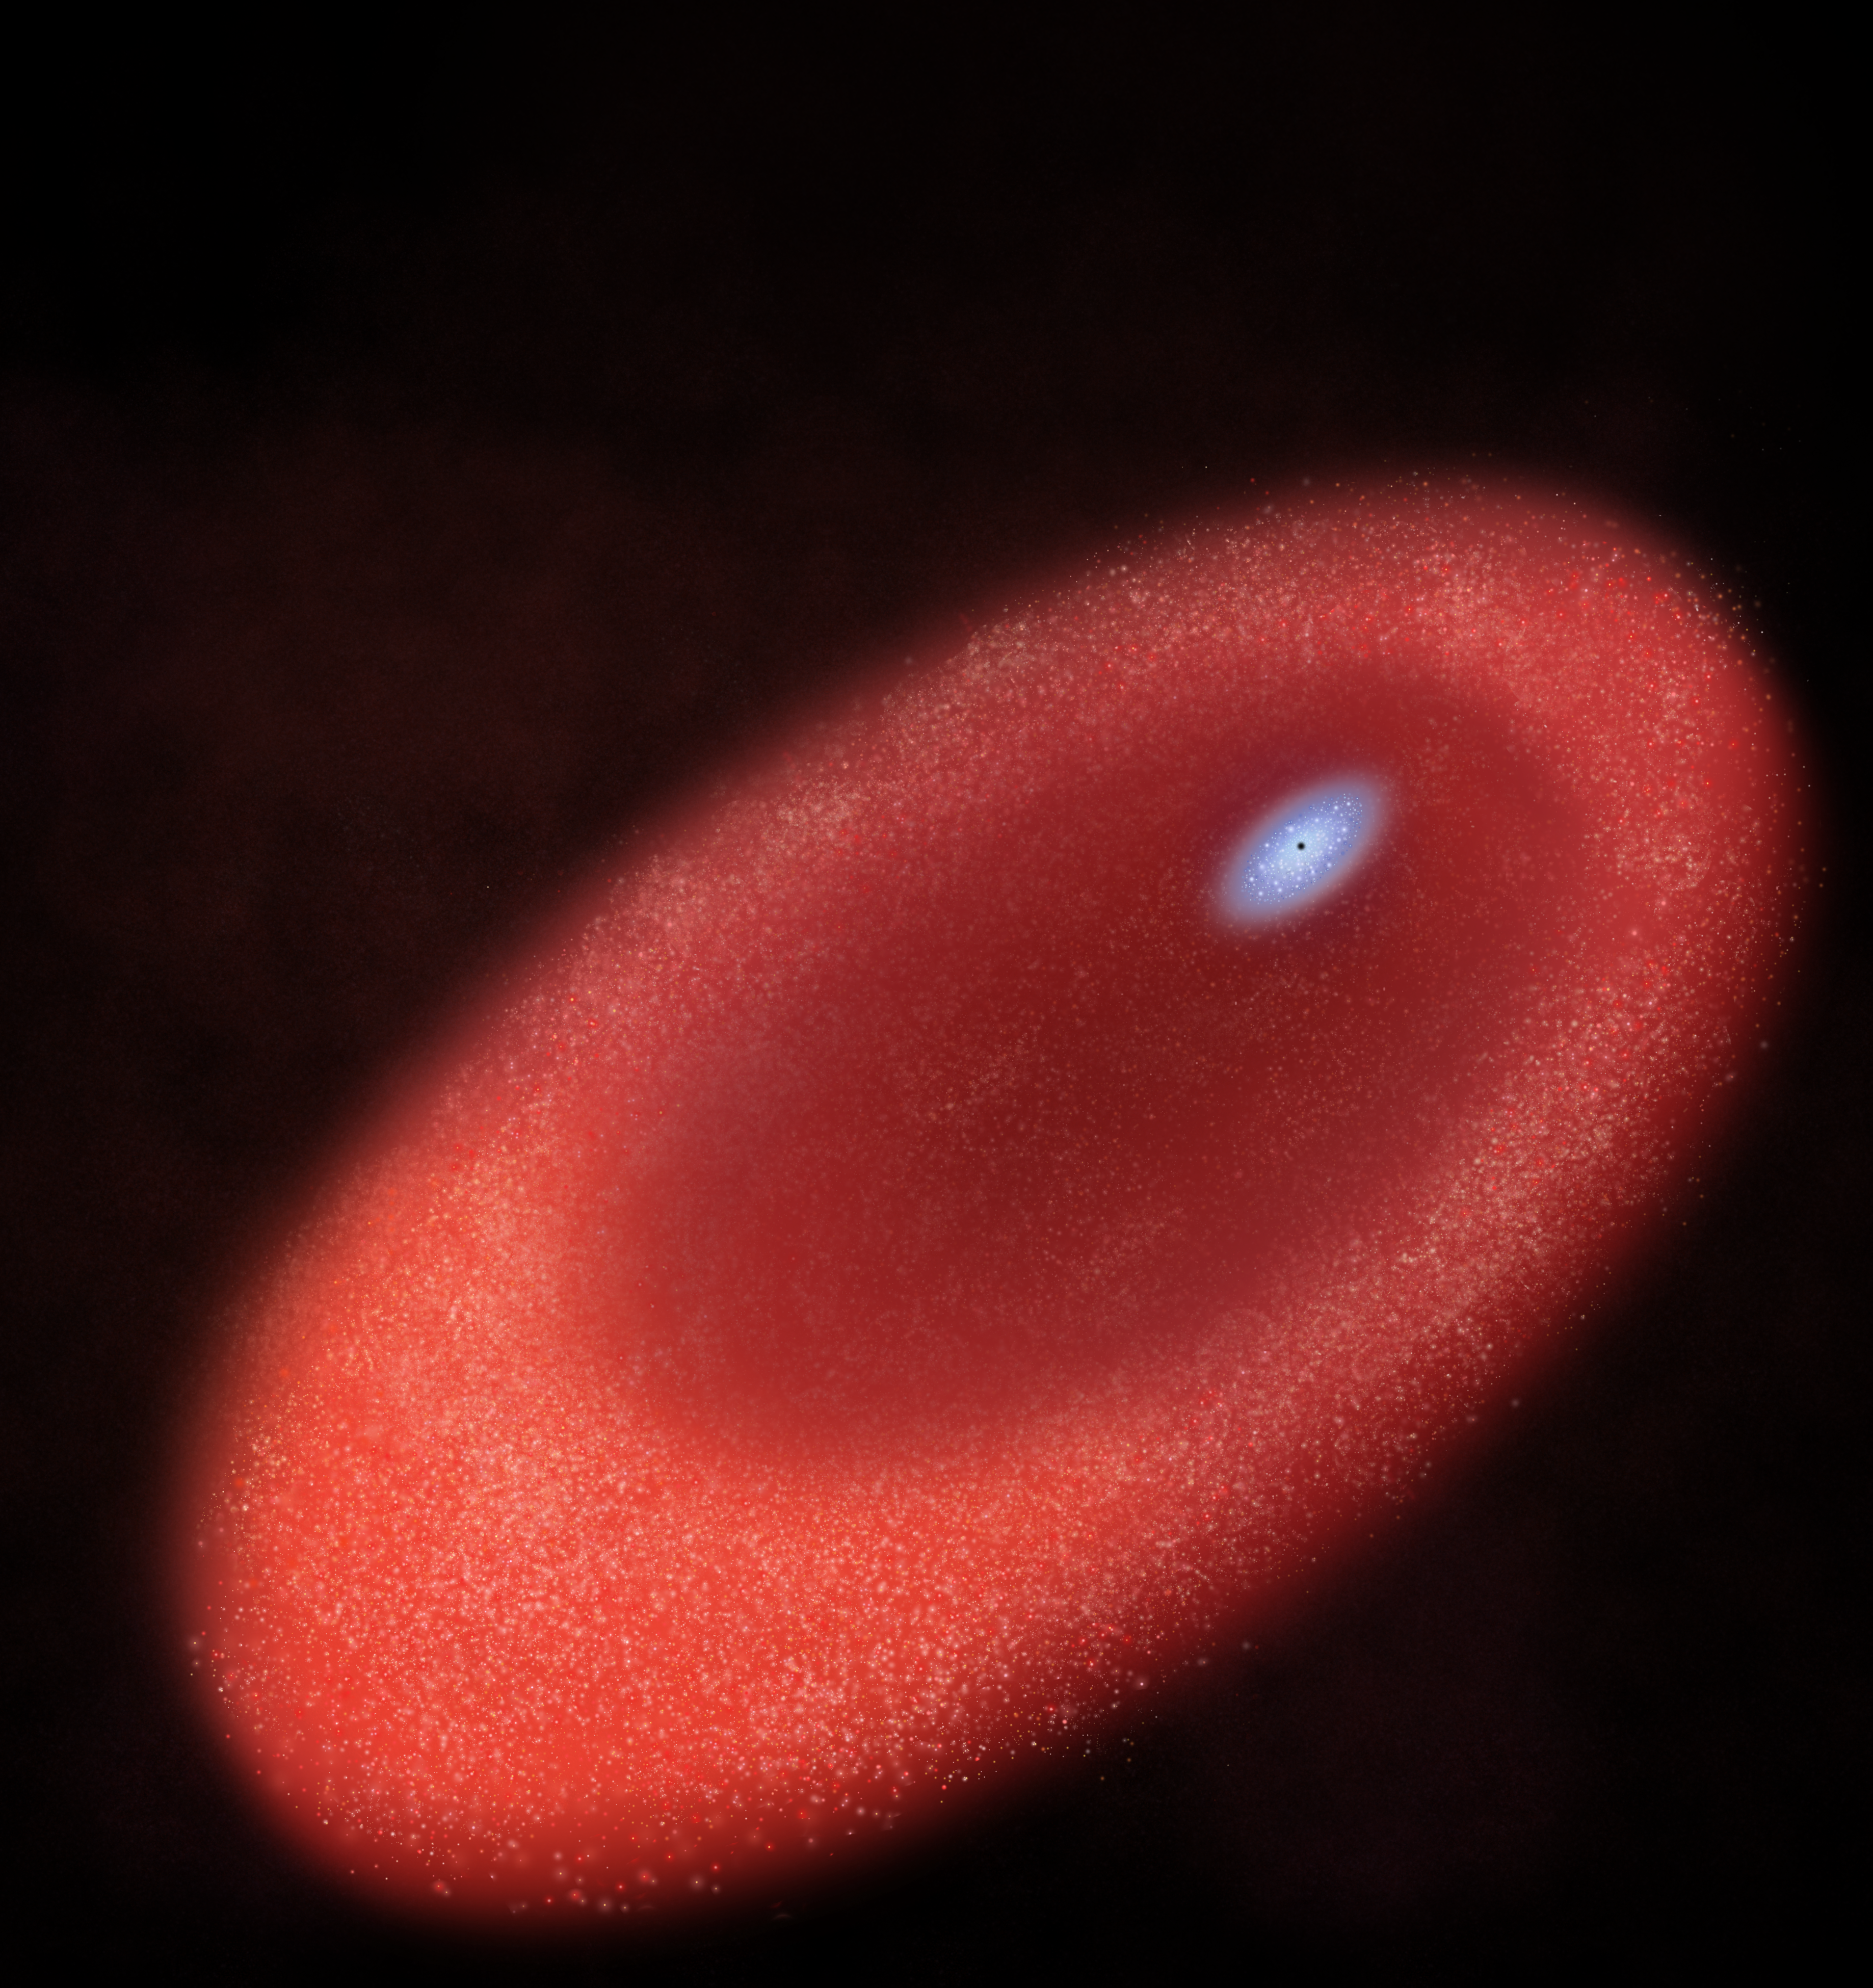

Artist's rendition of the core of M31

Artist's rendition of the core of M31 that shows a ring of older red stars and a disk of young blue stars.

Credit: NASA, ESA, and A. Feild (STScI)